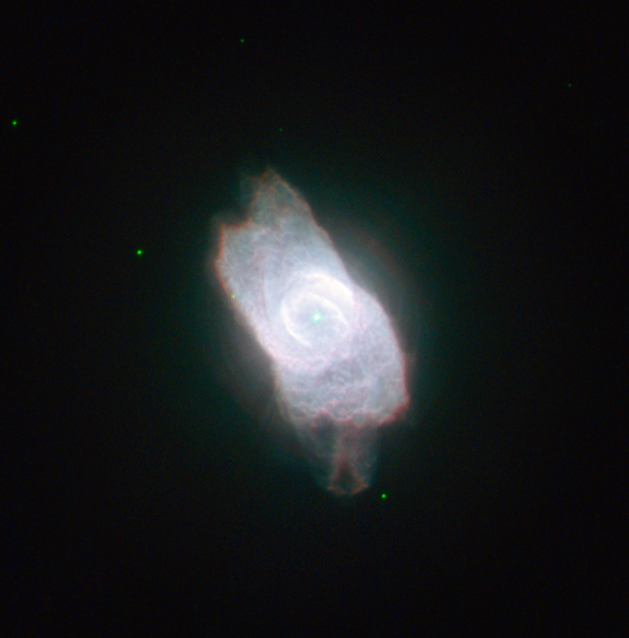

A dazzling planetary nebula

The NASA/ESA Hubble Space Telescope has turned its eagle eye to the planetary nebula NGC 6572, a very bright example of these strange but beautiful objects. Planetary nebulae are created during the late stages of the evolution of certain stars that eject gas into space and emit intense ultraviolet radiation that makes the material glow. This picture of NGC 6572 shows the intricate shapes that can develop as stars exhale their last breaths. Hubble has even imaged the central white dwarf star, the origin of the dazzling nebula, but now a faint, but hot, vestige of its former glory.

NGC 6572 only began to shed its gases a few thousand years ago, so it is a fairly young planetary nebula. As a result the material is still quite concentrated, which explains why it is abnormally bright. The envelope of gas is currently racing out into space at a speed of around 15 kilometres every second and as it becomes more diffuse, it will dim.

NGC 6572 was discovered in 1825 by the German astronomer Friedrich Georg Wilhelm von Struve, who came from a family of distinguished stargazers. The name planetary nebula is left over from the time when the telescopes of early astronomers were not good enough to reveal the true nature of these objects. To many, the discs looked like the outer planets Uranus and Neptune. The application of spectral analysis, later in the 19th century, first revealed that they were glowing gas clouds.

NGC 6572 is magnitude 8.1, easily bright enough to make it an appealing target for amateur astronomers with telescopes. It is located within the large constellation of Ophiuchus (the Serpent Bearer) and at low magnification it will appear to be just a coloured star, but higher magnification will reveal its shape. Some observers report that NGC 6572 looks blue, while others state that it is green. Colour as seen through the eyepiece is often a matter of interpretation, so you may make your own decision!

This picture was created from images taken with Hubble’s Wide Field Camera 2. Images through a blue filter that isolates the glow from hydrogen gas (Hβ, F487N, coloured dark blue), a green filter that isolates emission from ionised oxygen (F502N, coloured blue), a yellow broadband filter (F555W, coloured green) and a red filter that passes emission from hydrogen (Hα, F656N) have been combined. The exposure times were 360 s, 240 s, 100 s and 180 s, respectively and the field of view is just 29 arcseconds across.

Credit: ESA/Hubble & NASA